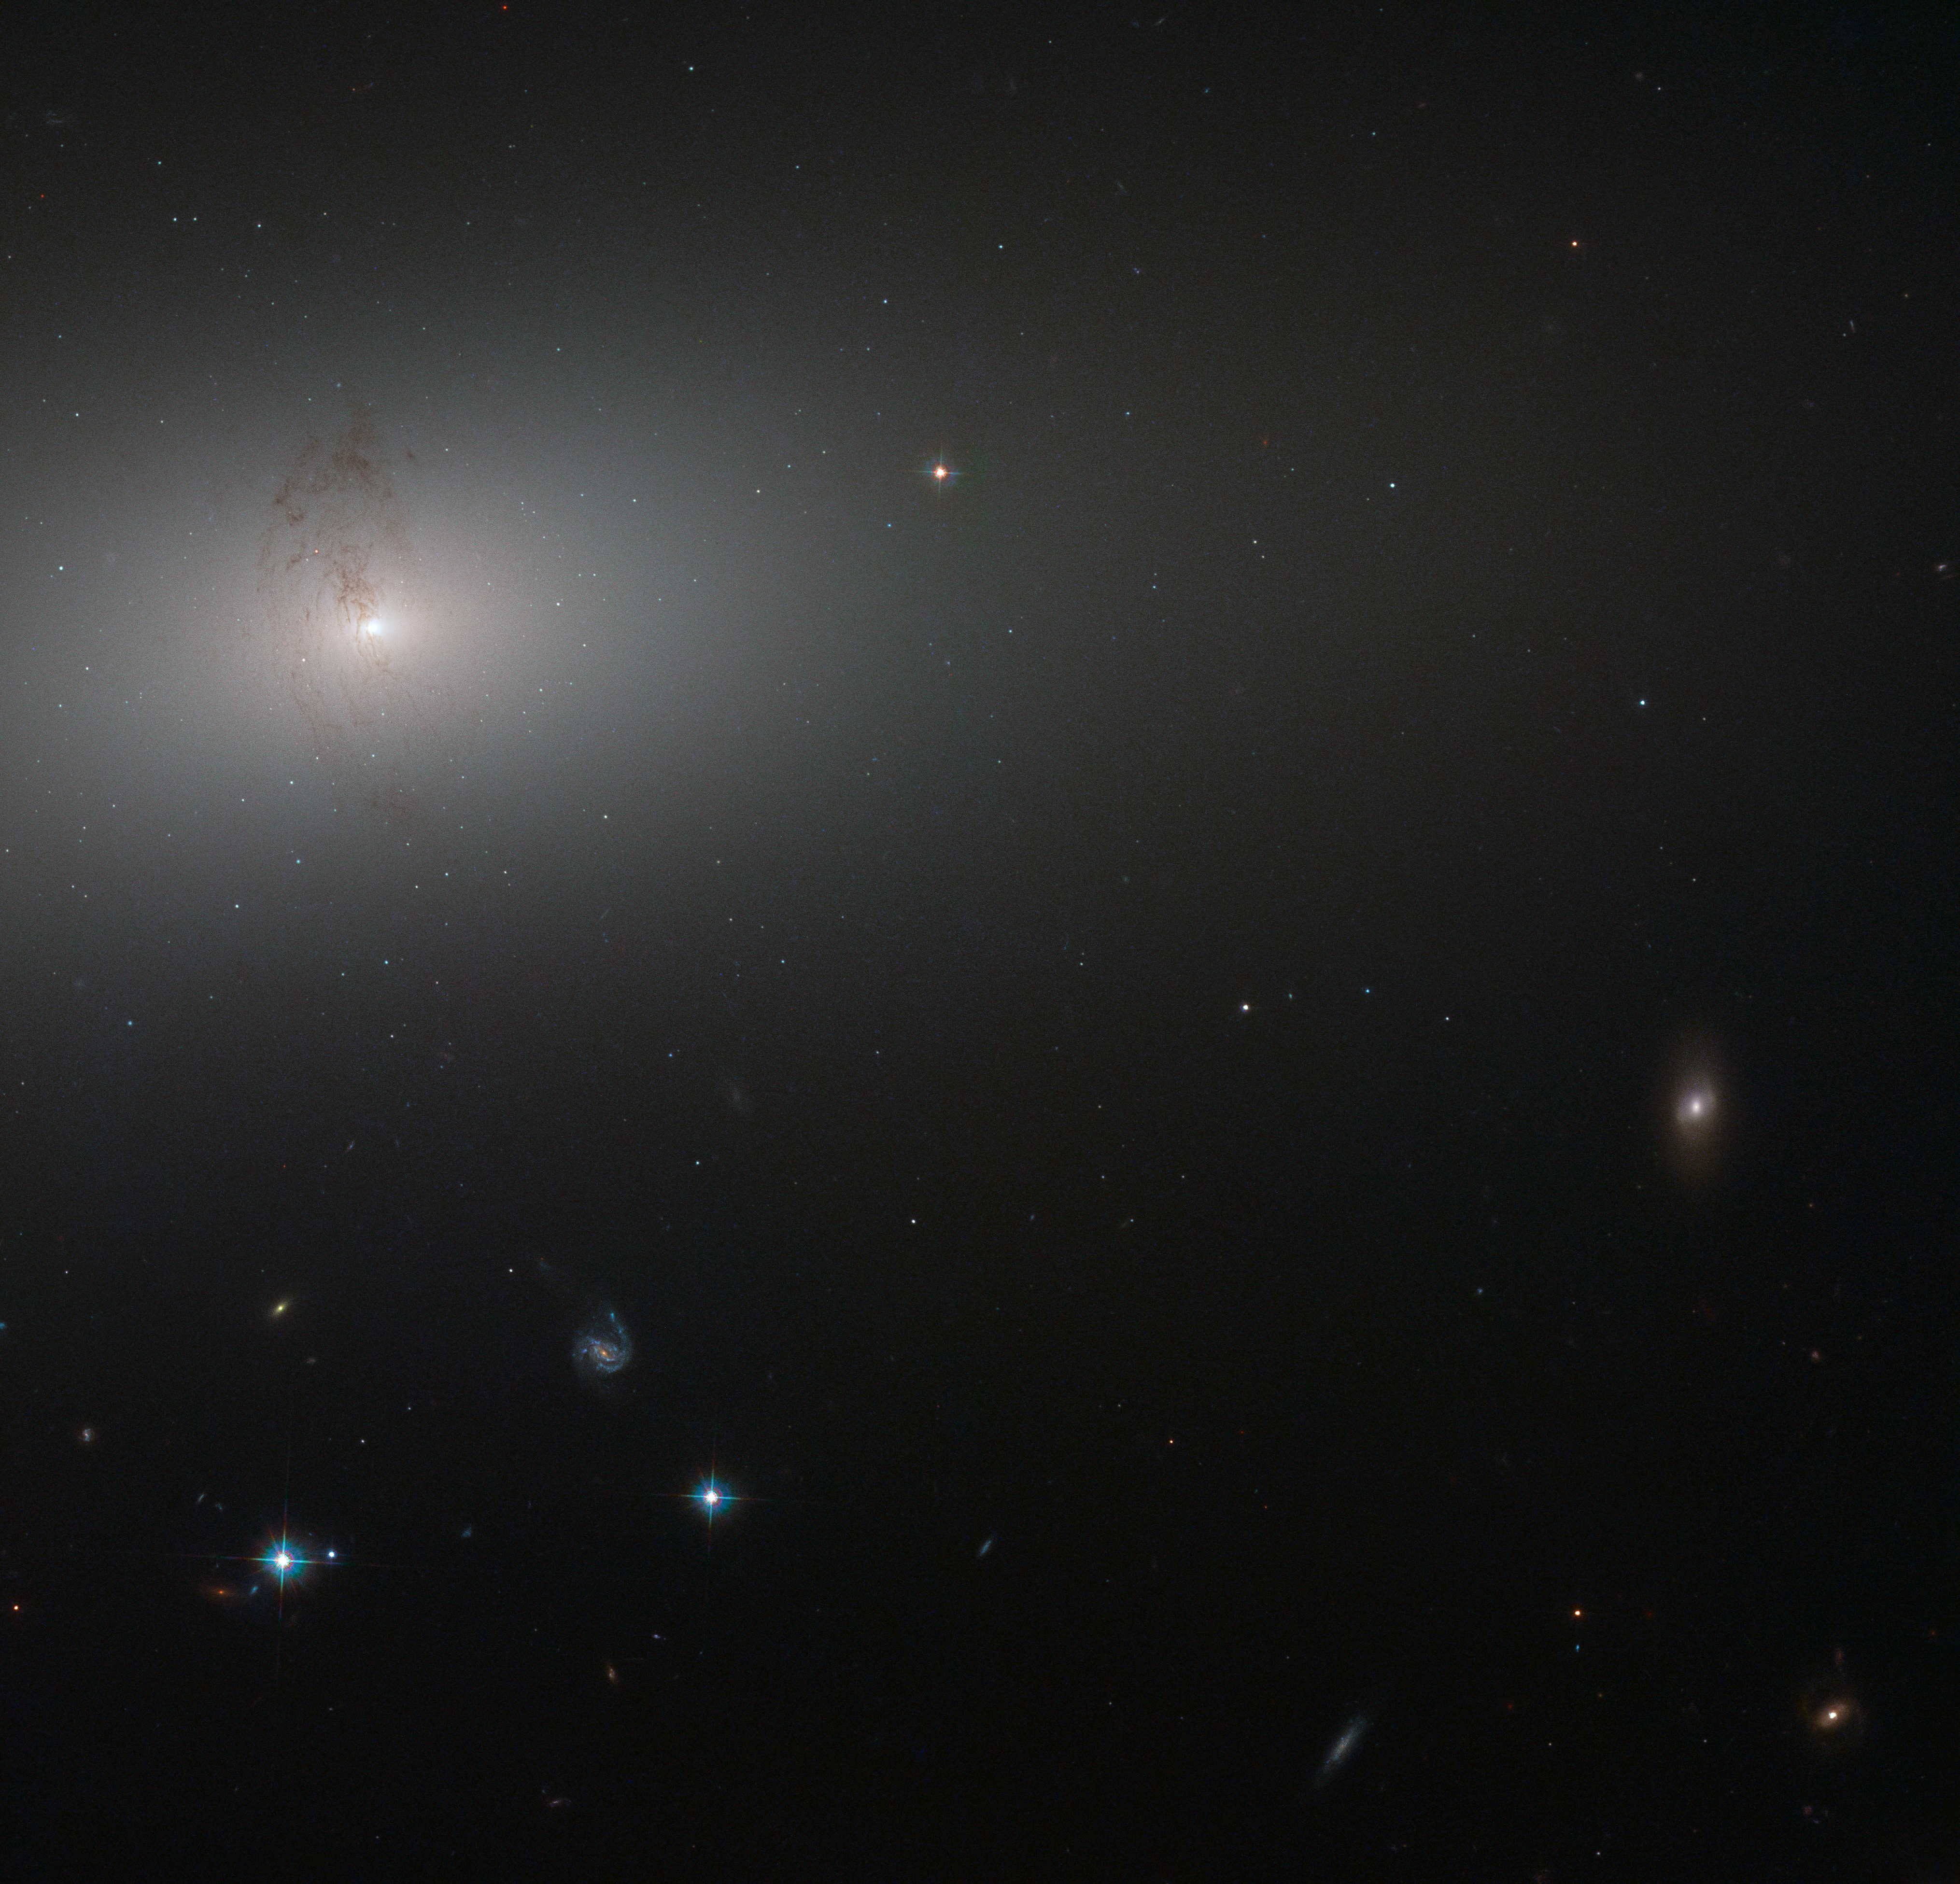

Through the elliptical haze

Like a lighthouse in the fog the luminous core of NGC 2768 slowly fades outwards to a dull white haze in this image taken by the NASA/ESA Hubble Space Telescope.

NGC 2768 is an elliptical galaxy in the constellation of Ursa Major (The Great Bear). It is a huge bundle of stars, dominated by a bright central region, where a supermassive black hole feasts on a constant stream of gas and dust being fed to it by its galactic host.

The galaxy is also marked by a prominent plume of dust reaching out from the centre and lying perpendicular to the galaxy’s plane. This dust conceals a symmetrical, s-shaped pair of jets that are being produced by the supermassive black hole as it feeds.

Credit: ESA/Hubble, NASA and S. Smartt (Queen's University Belfast)